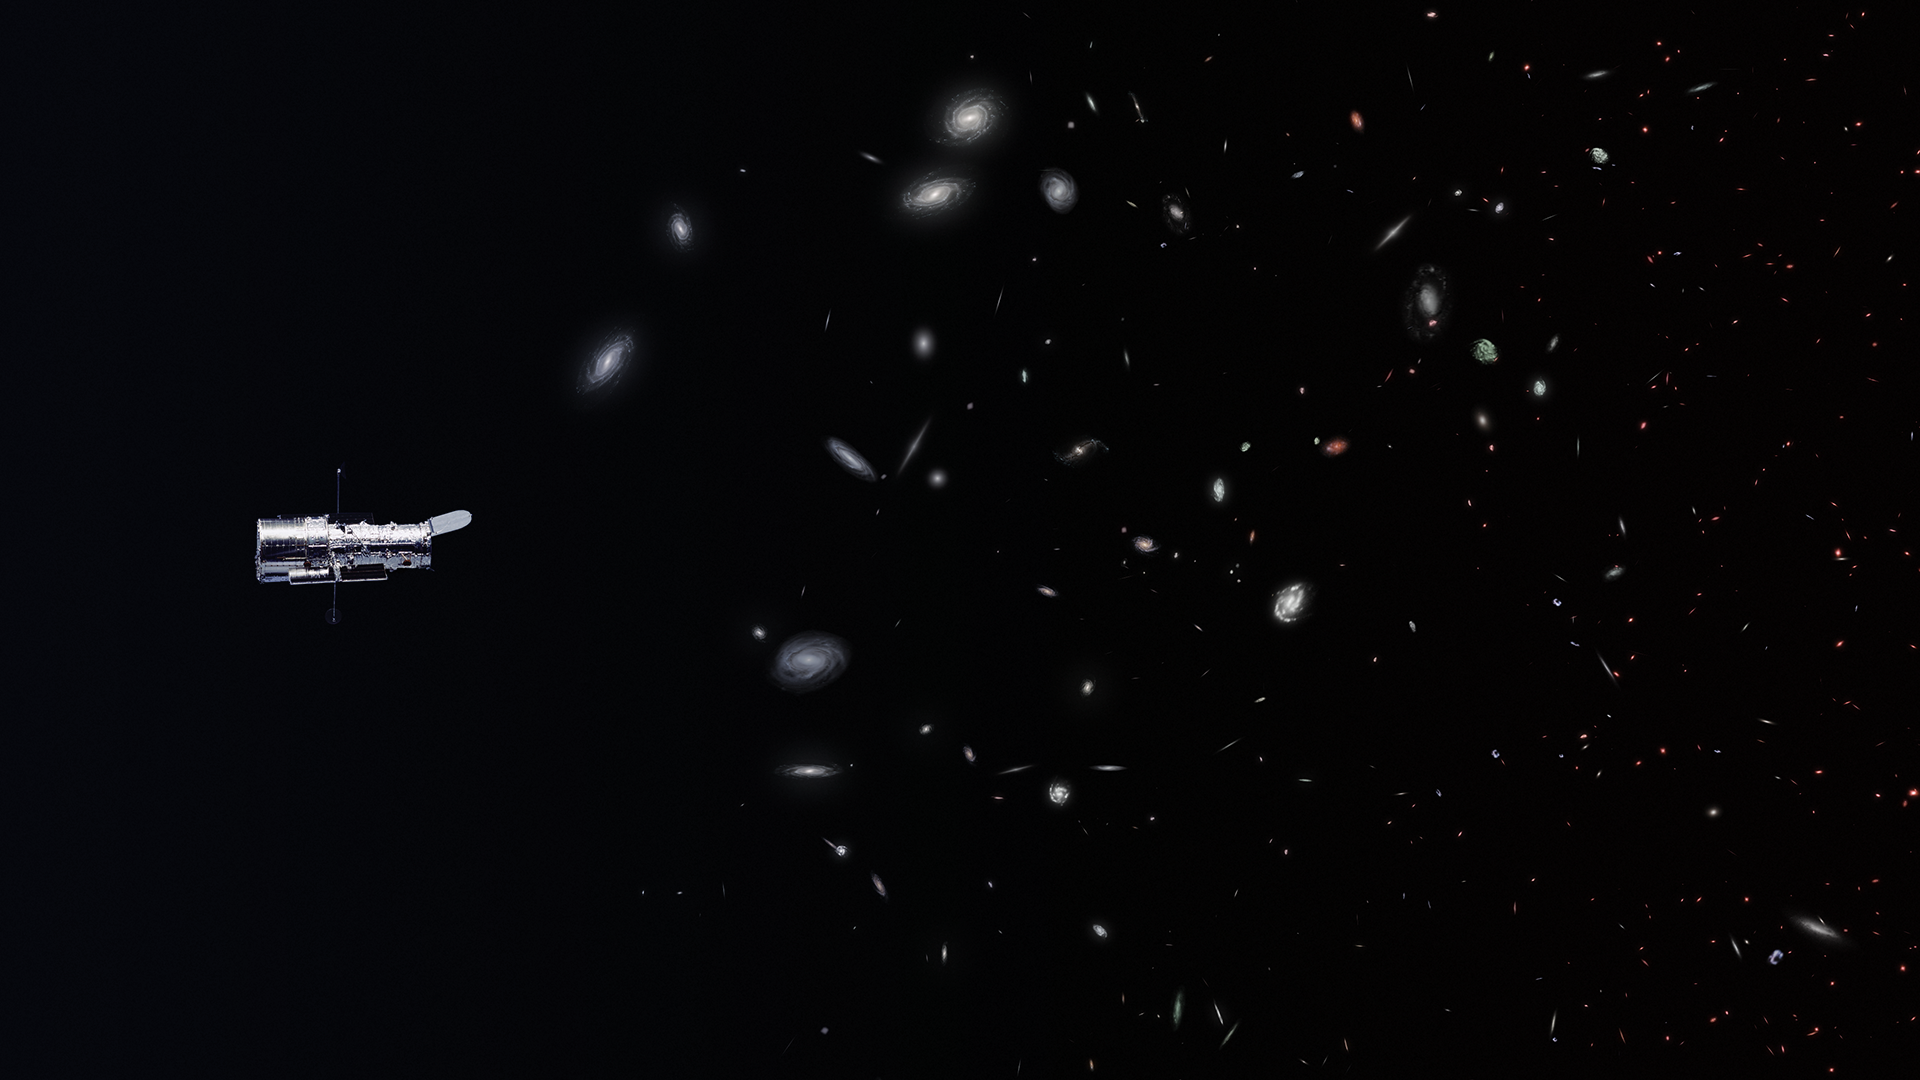

Still from Hubblecast 96: How many galaxies are there?

This is a still from Hubblecast 96.

Credit: NASA & ESA